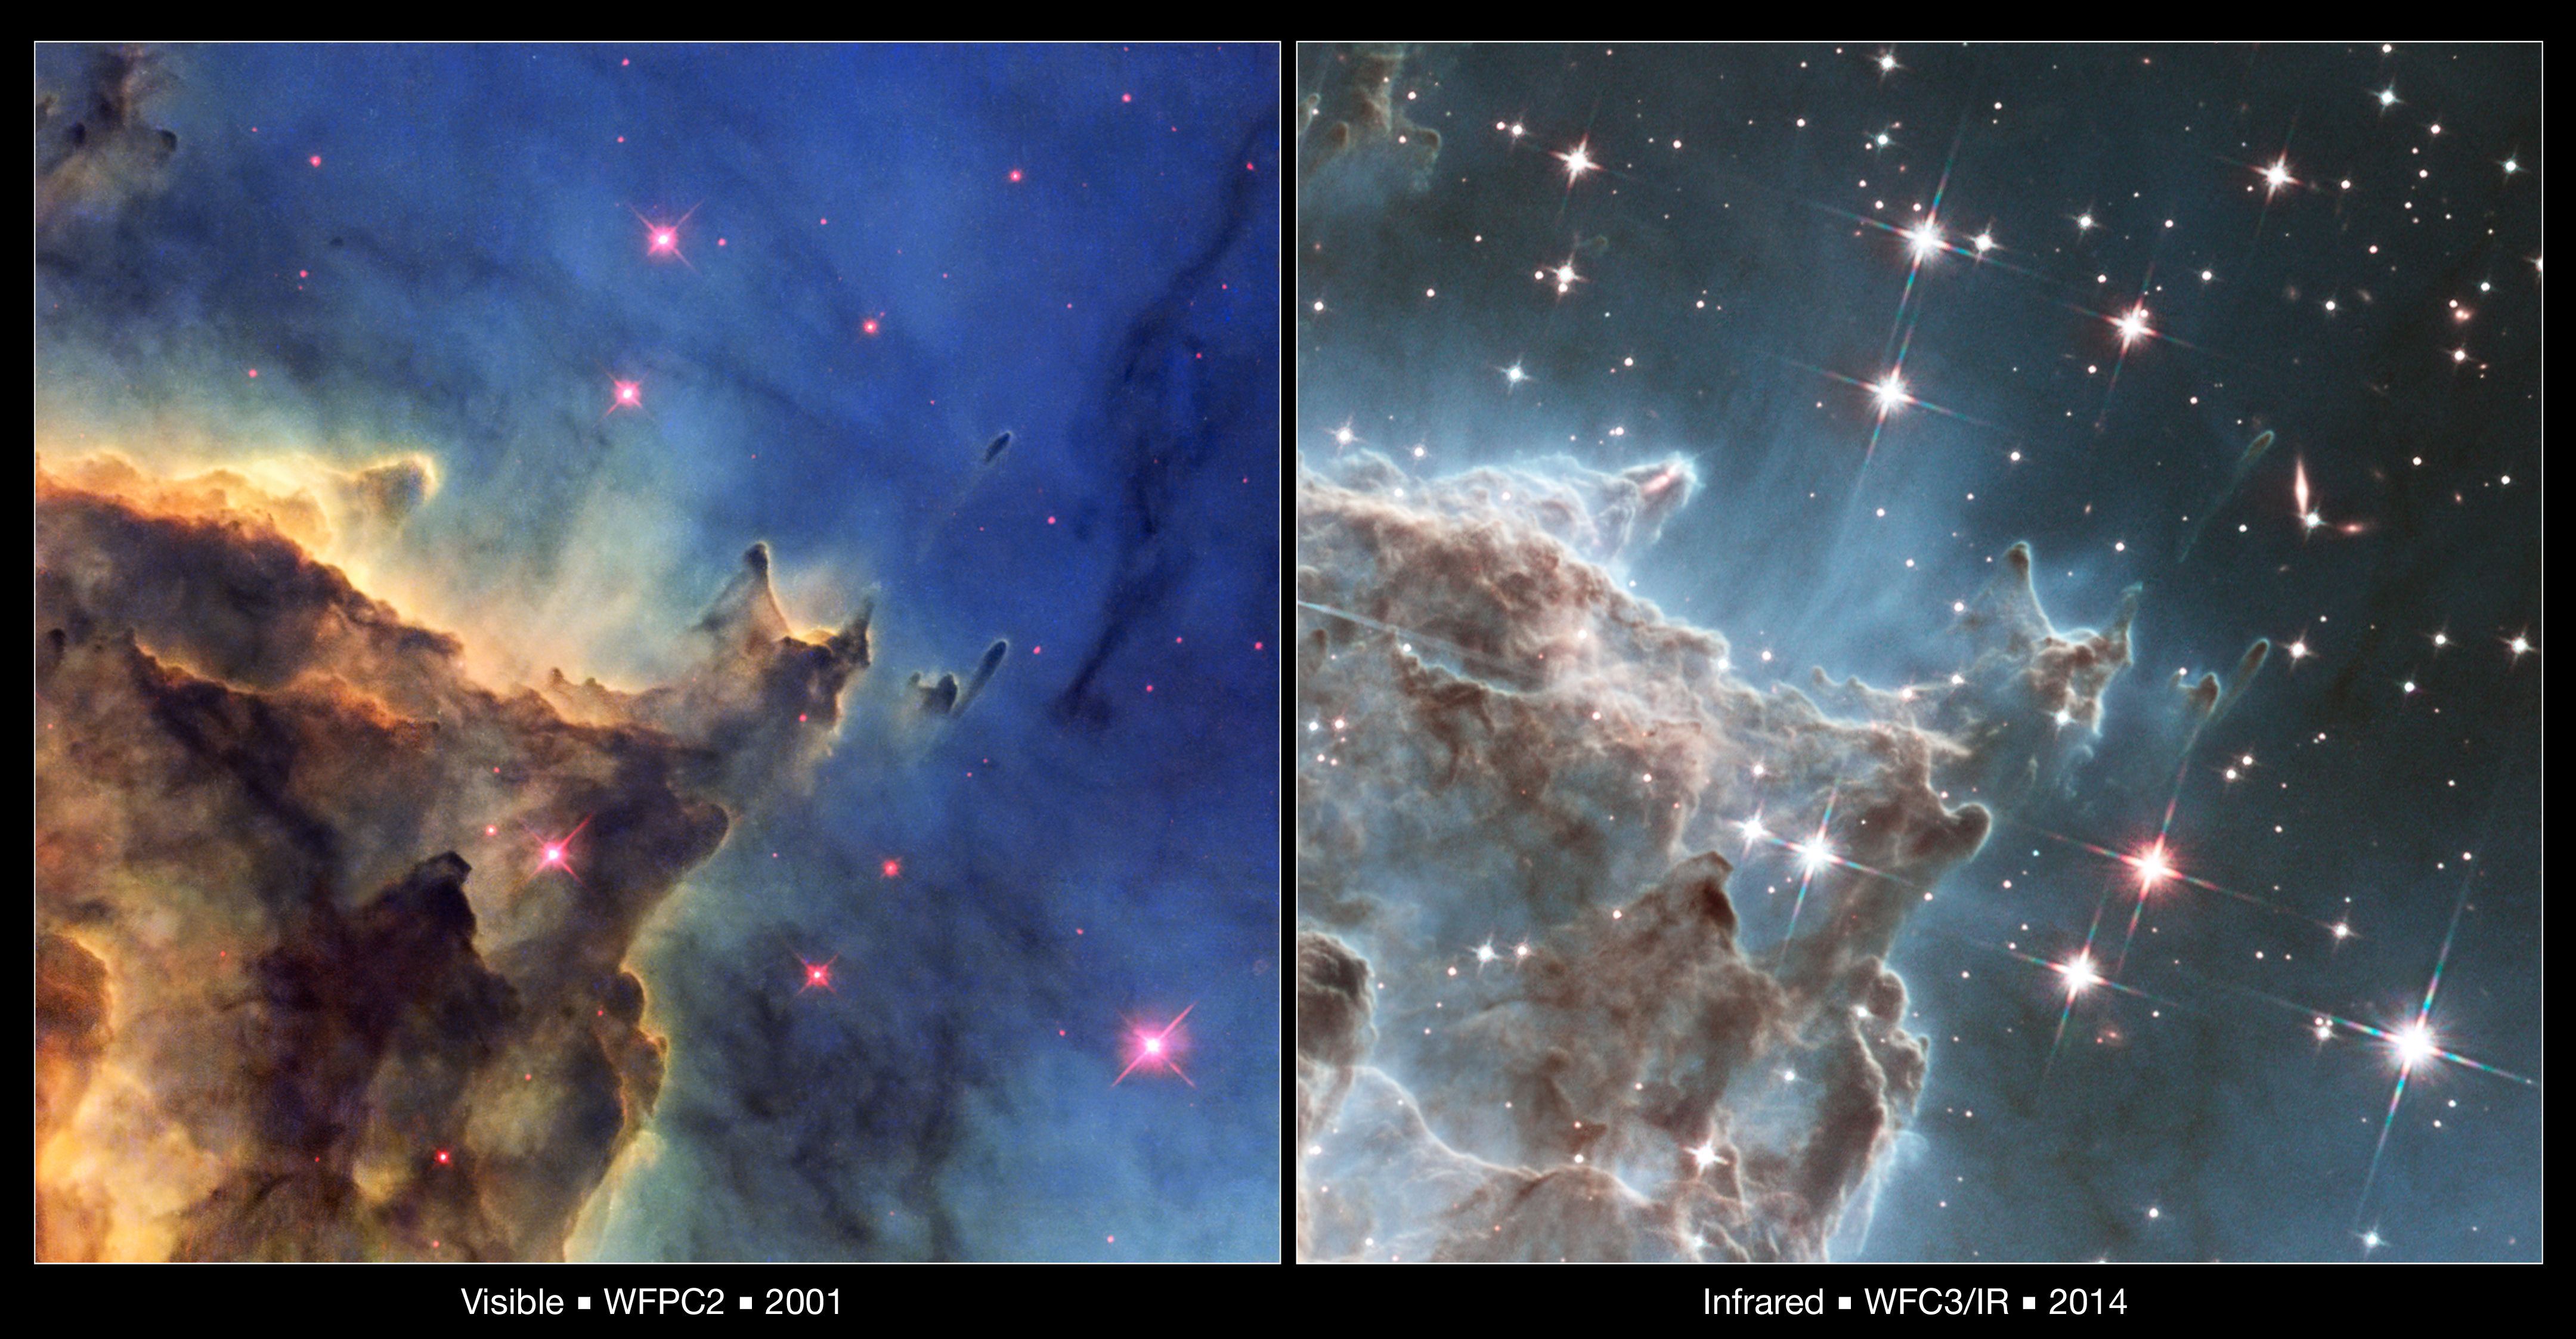

Visible and Infrared Comparison of NGC 2174

This image compares two views of the same detailed area in the star-forming nebula NGC 2174 from the Hubble Space Telescope. On the left is a visible-light image made by WFPC2 observations taken in 2001 — and released in 2011 — and on the right is an image made by the WFC3 infrared camera. Infrared light penetrates more dust and gas than visible light, allowing details to become visible. A jet of material from a newly forming star is visible in one of the pillars, just above and left of centre in the right-hand image. Several galaxies are seen in the infrared view, much more distant than the columns of dust and gas.

Credit: NASA and ESA Acknowledgment: NASA, ESA, and the Hubble Heritage Team (STScI/AURA), and J. Hester